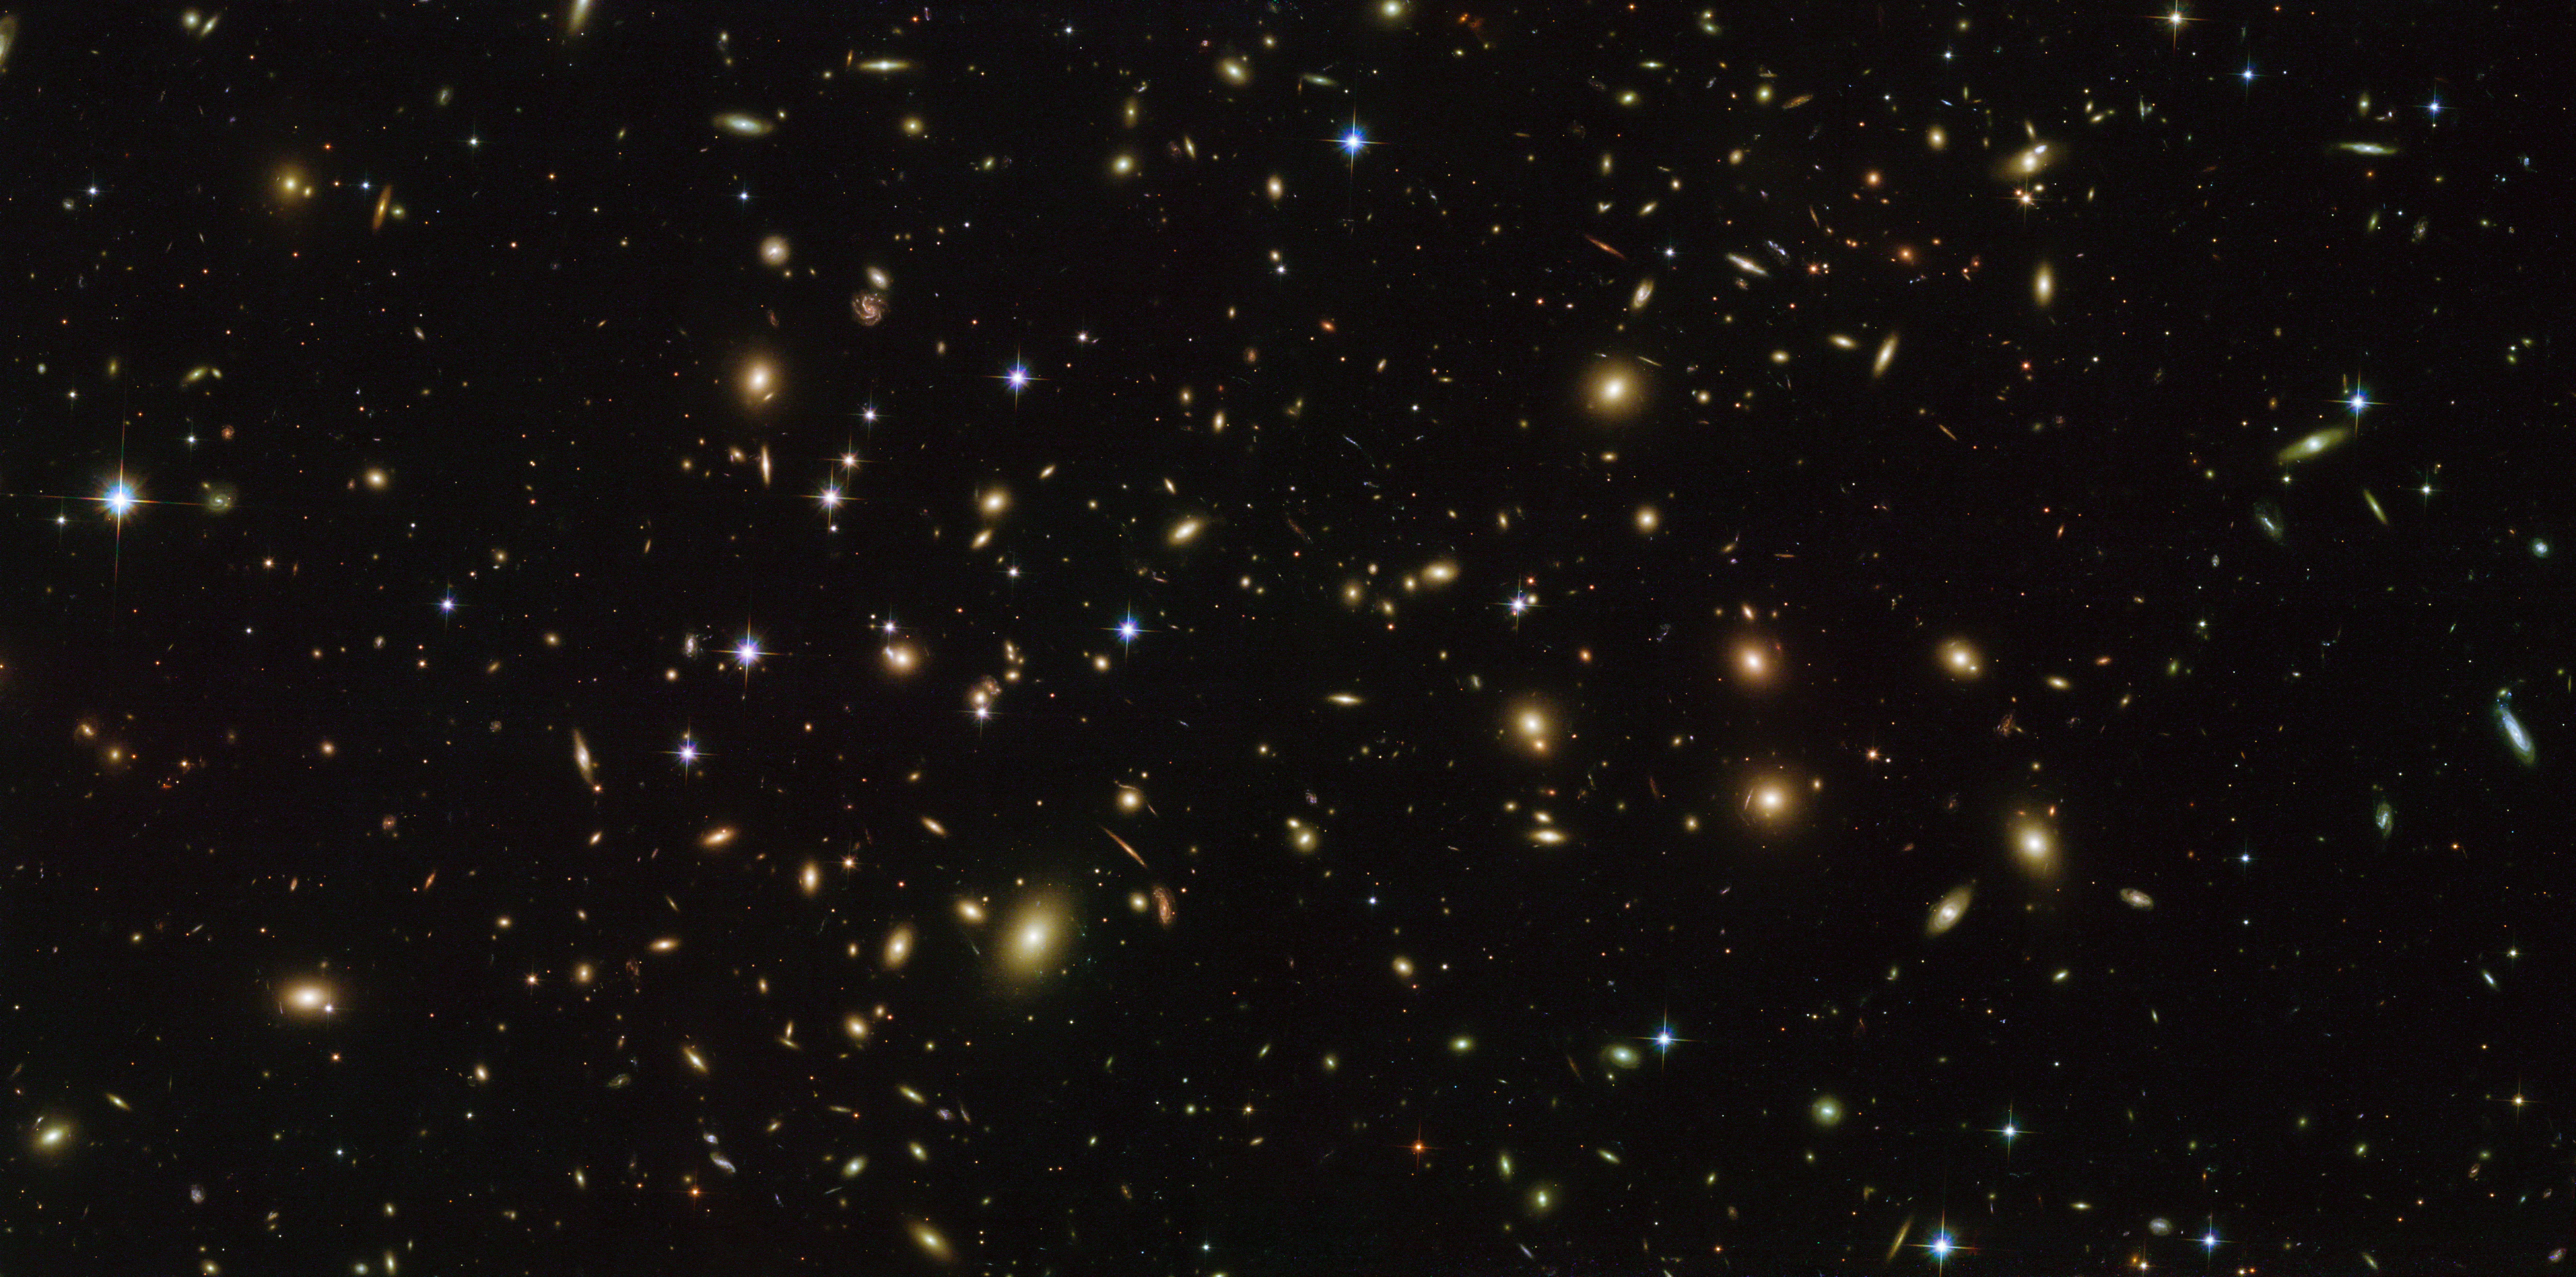

Cosmic fireflies

Galaxies glow like fireflies in this spectacular NASA/ESA Hubble Space Telescope image! This flickering swarm of cosmic fireflies is a rich cluster of galaxies called Abell 2163. Abell 2163 is a member of the Abell catalogue, an all-sky catalogue of over 4000 galaxy clusters. It is particularly well-studied because the material sitting at its core (its intracluster medium) exhibits exceptional properties, including a large and bright radio halo and extraordinarily high temperatures and X-ray luminosities. It is the hottest cluster in the catalogue! Observing massive clusters like Abell 2163 can contribute to the study of dark matter, and provide a new perspective on the distant Universe via phenomena such as gravitational lensing.

This image was taken by Hubble’s Advanced Camera for Surveys and Wide-Field Camera 3, partially for an extensive observing programme called RELICS. The programme is imaging 41 massive galaxy clusters to find the brightest distant galaxies, which will be studied in more detail using both current telescopes and the future NASA/ESA/CSA James Webb Space Telescope (JWST).

Credit: ESA/Hubble & NASA